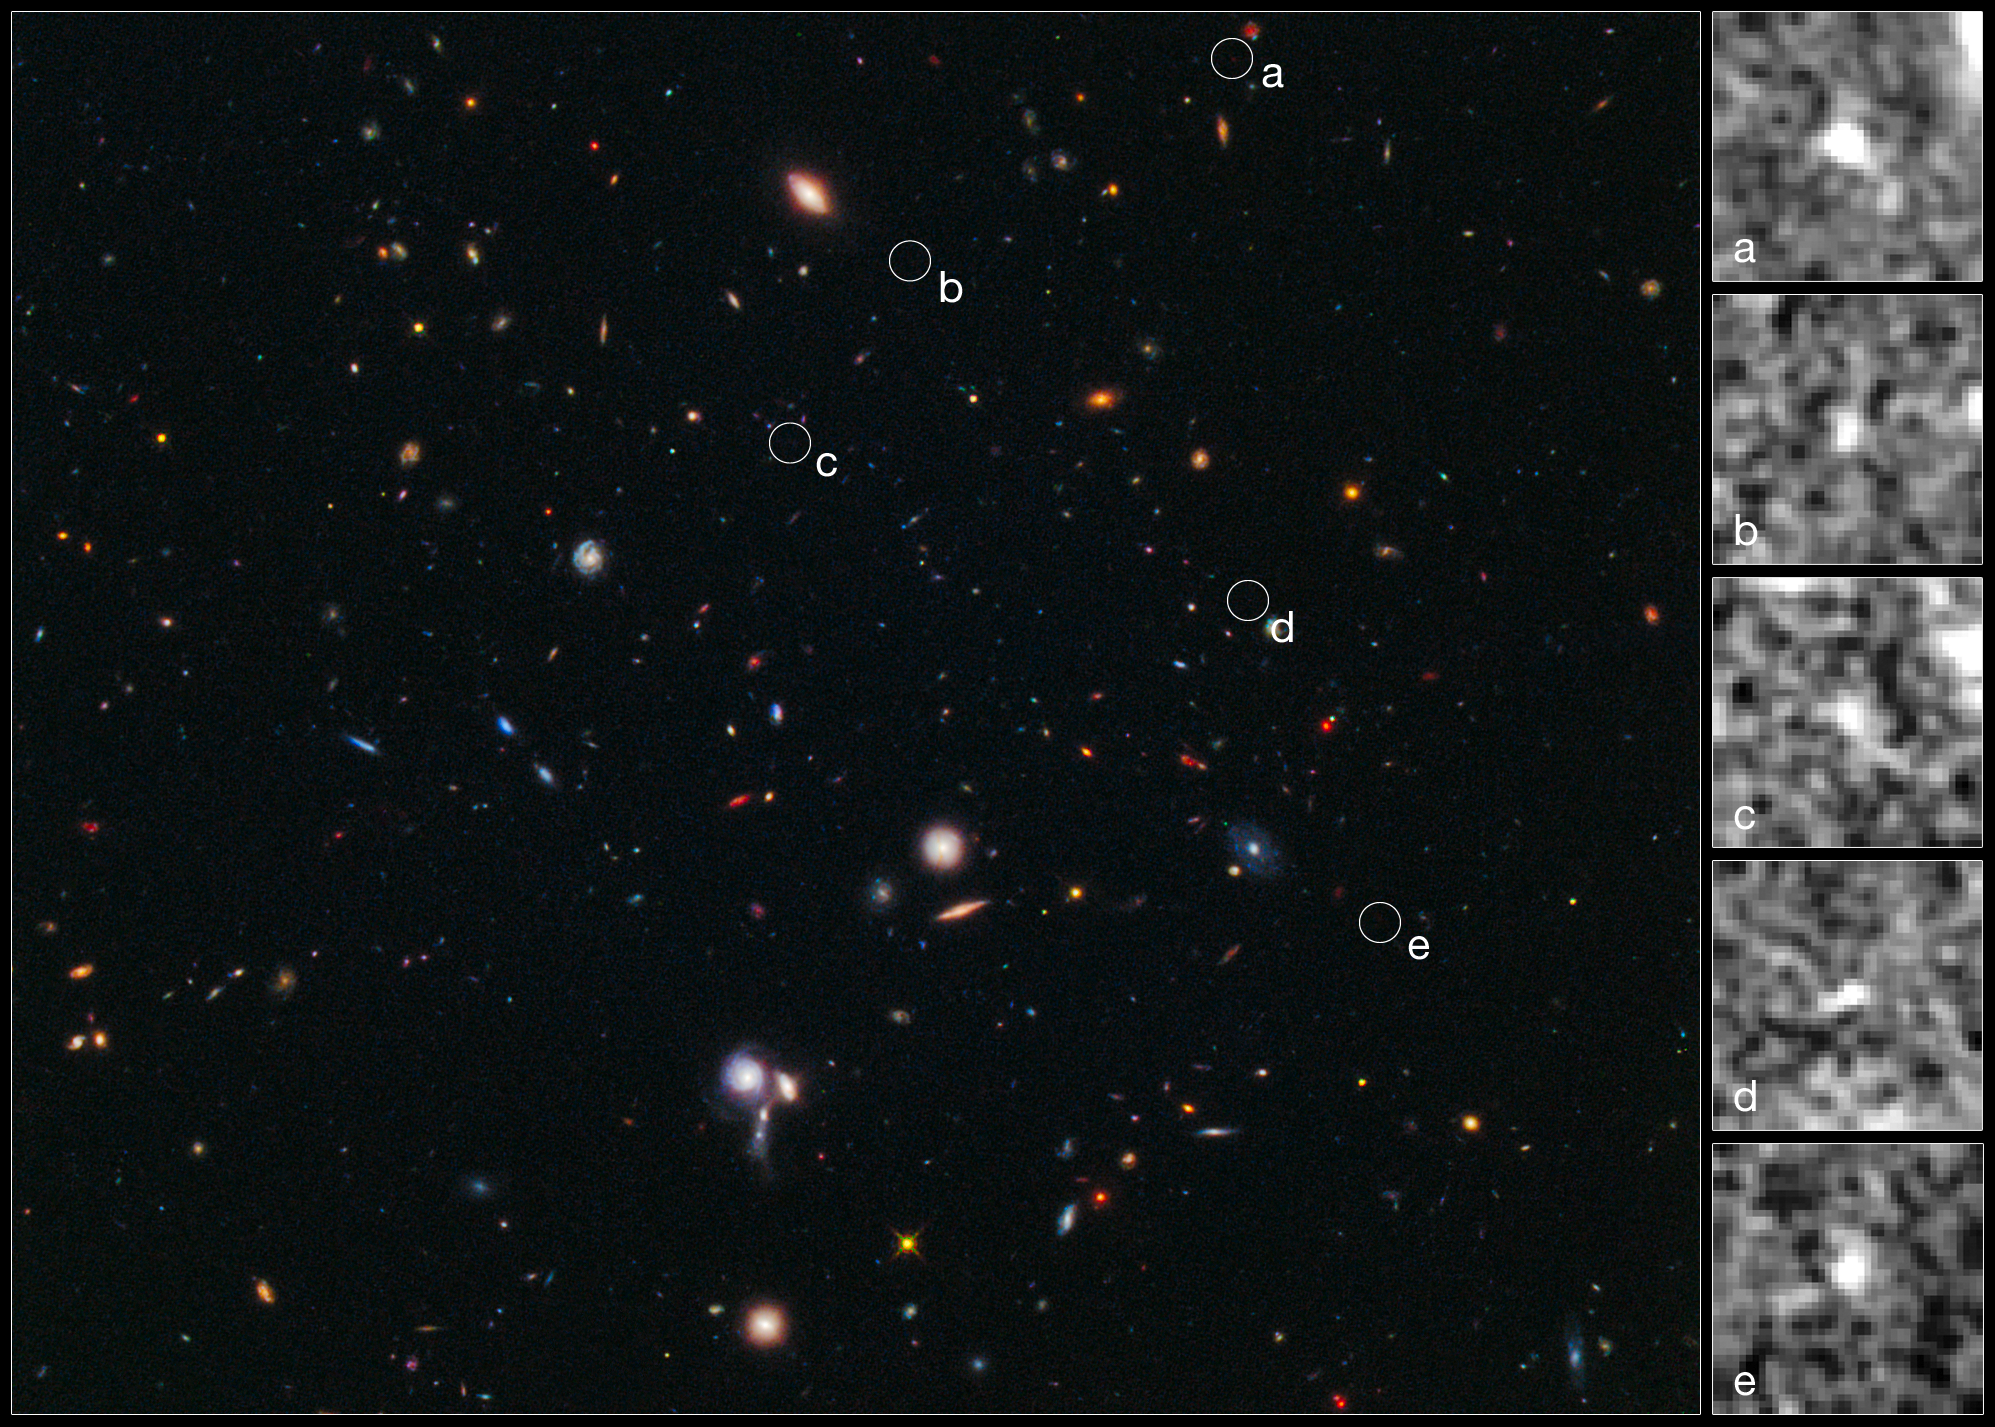

Hubble spies building blocks of most distant galaxy cluster

The composite image at left, taken in visible and near-infrared light, reveals the location of five galaxies clustered together just 600 million years after the Universe’s birth in the Big Bang. The circles pinpoint the galaxies.

The sharp-eyed Wide Field Camera 3 aboard the NASA/ESA Hubble Space Telescope spied the galaxies in a random sky survey. The developing cluster is the most distant ever observed.

The average distance between them is comparable to that of the galaxies in the Local Group, consisting of two large spiral galaxies, the Milky Way and the Andromeda Galaxy, and a few dozen small dwarf galaxies.

The close-up images at right, taken in near-infrared light, show the galaxies. Simulations show that the galaxies will eventually merge and form the brightest central galaxy in the cluster, a giant elliptical similar to the Virgo cluster’s Messier 87.

Galaxy clusters are the largest structures in the Universe, comprising hundreds to thousands of galaxies bound together by gravity. The developing cluster presumably will grow into a massive galactic city, similar in size to the nearby Virgo Cluster, a collection of more than 2000 galaxies.

Credit: NASA, ESA, M. Trenti (University of Cambridge, UK and University of Colorado, Boulder, USA), L. Bradley (STScI), and the BoRG team